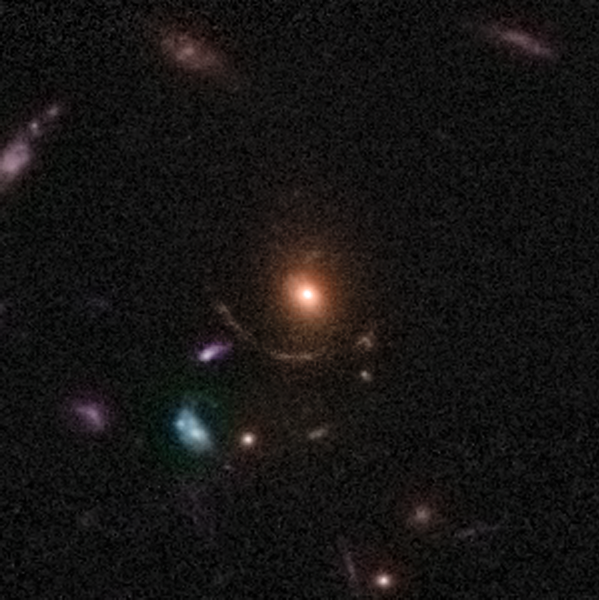

Gravitational Lens 0047+5023

This lens is an example of the rich diversity of 67 strong gravitational lenses found in the COSMOS survey. It shows one triple and one quadruple lens, discovered in a recently completed, large set of observations as part of a project to survey a single 1.6-square-degree field of sky (nine times the area of the full Moon) with several space-based and Earth-based observatories.

Gravitational lenses occur when light travelling towards us from a distant galaxy is magnified and distorted as it encounters a massive object between the galaxy and us. These gravitational lenses often allow astronomers to peer much further back into the early Universe than they would normally be able to.

This is a greyscale image taken by Hubble ACS camera and colourised with ground-based data from the CFHT (Canada-France-Hawaii Telescope).

Credit: NASA, ESA, C. Faure (Zentrum für Astronomie, University of Heidelberg) and J.P. Kneib (Laboratoire d'Astrophysique de Marseille)